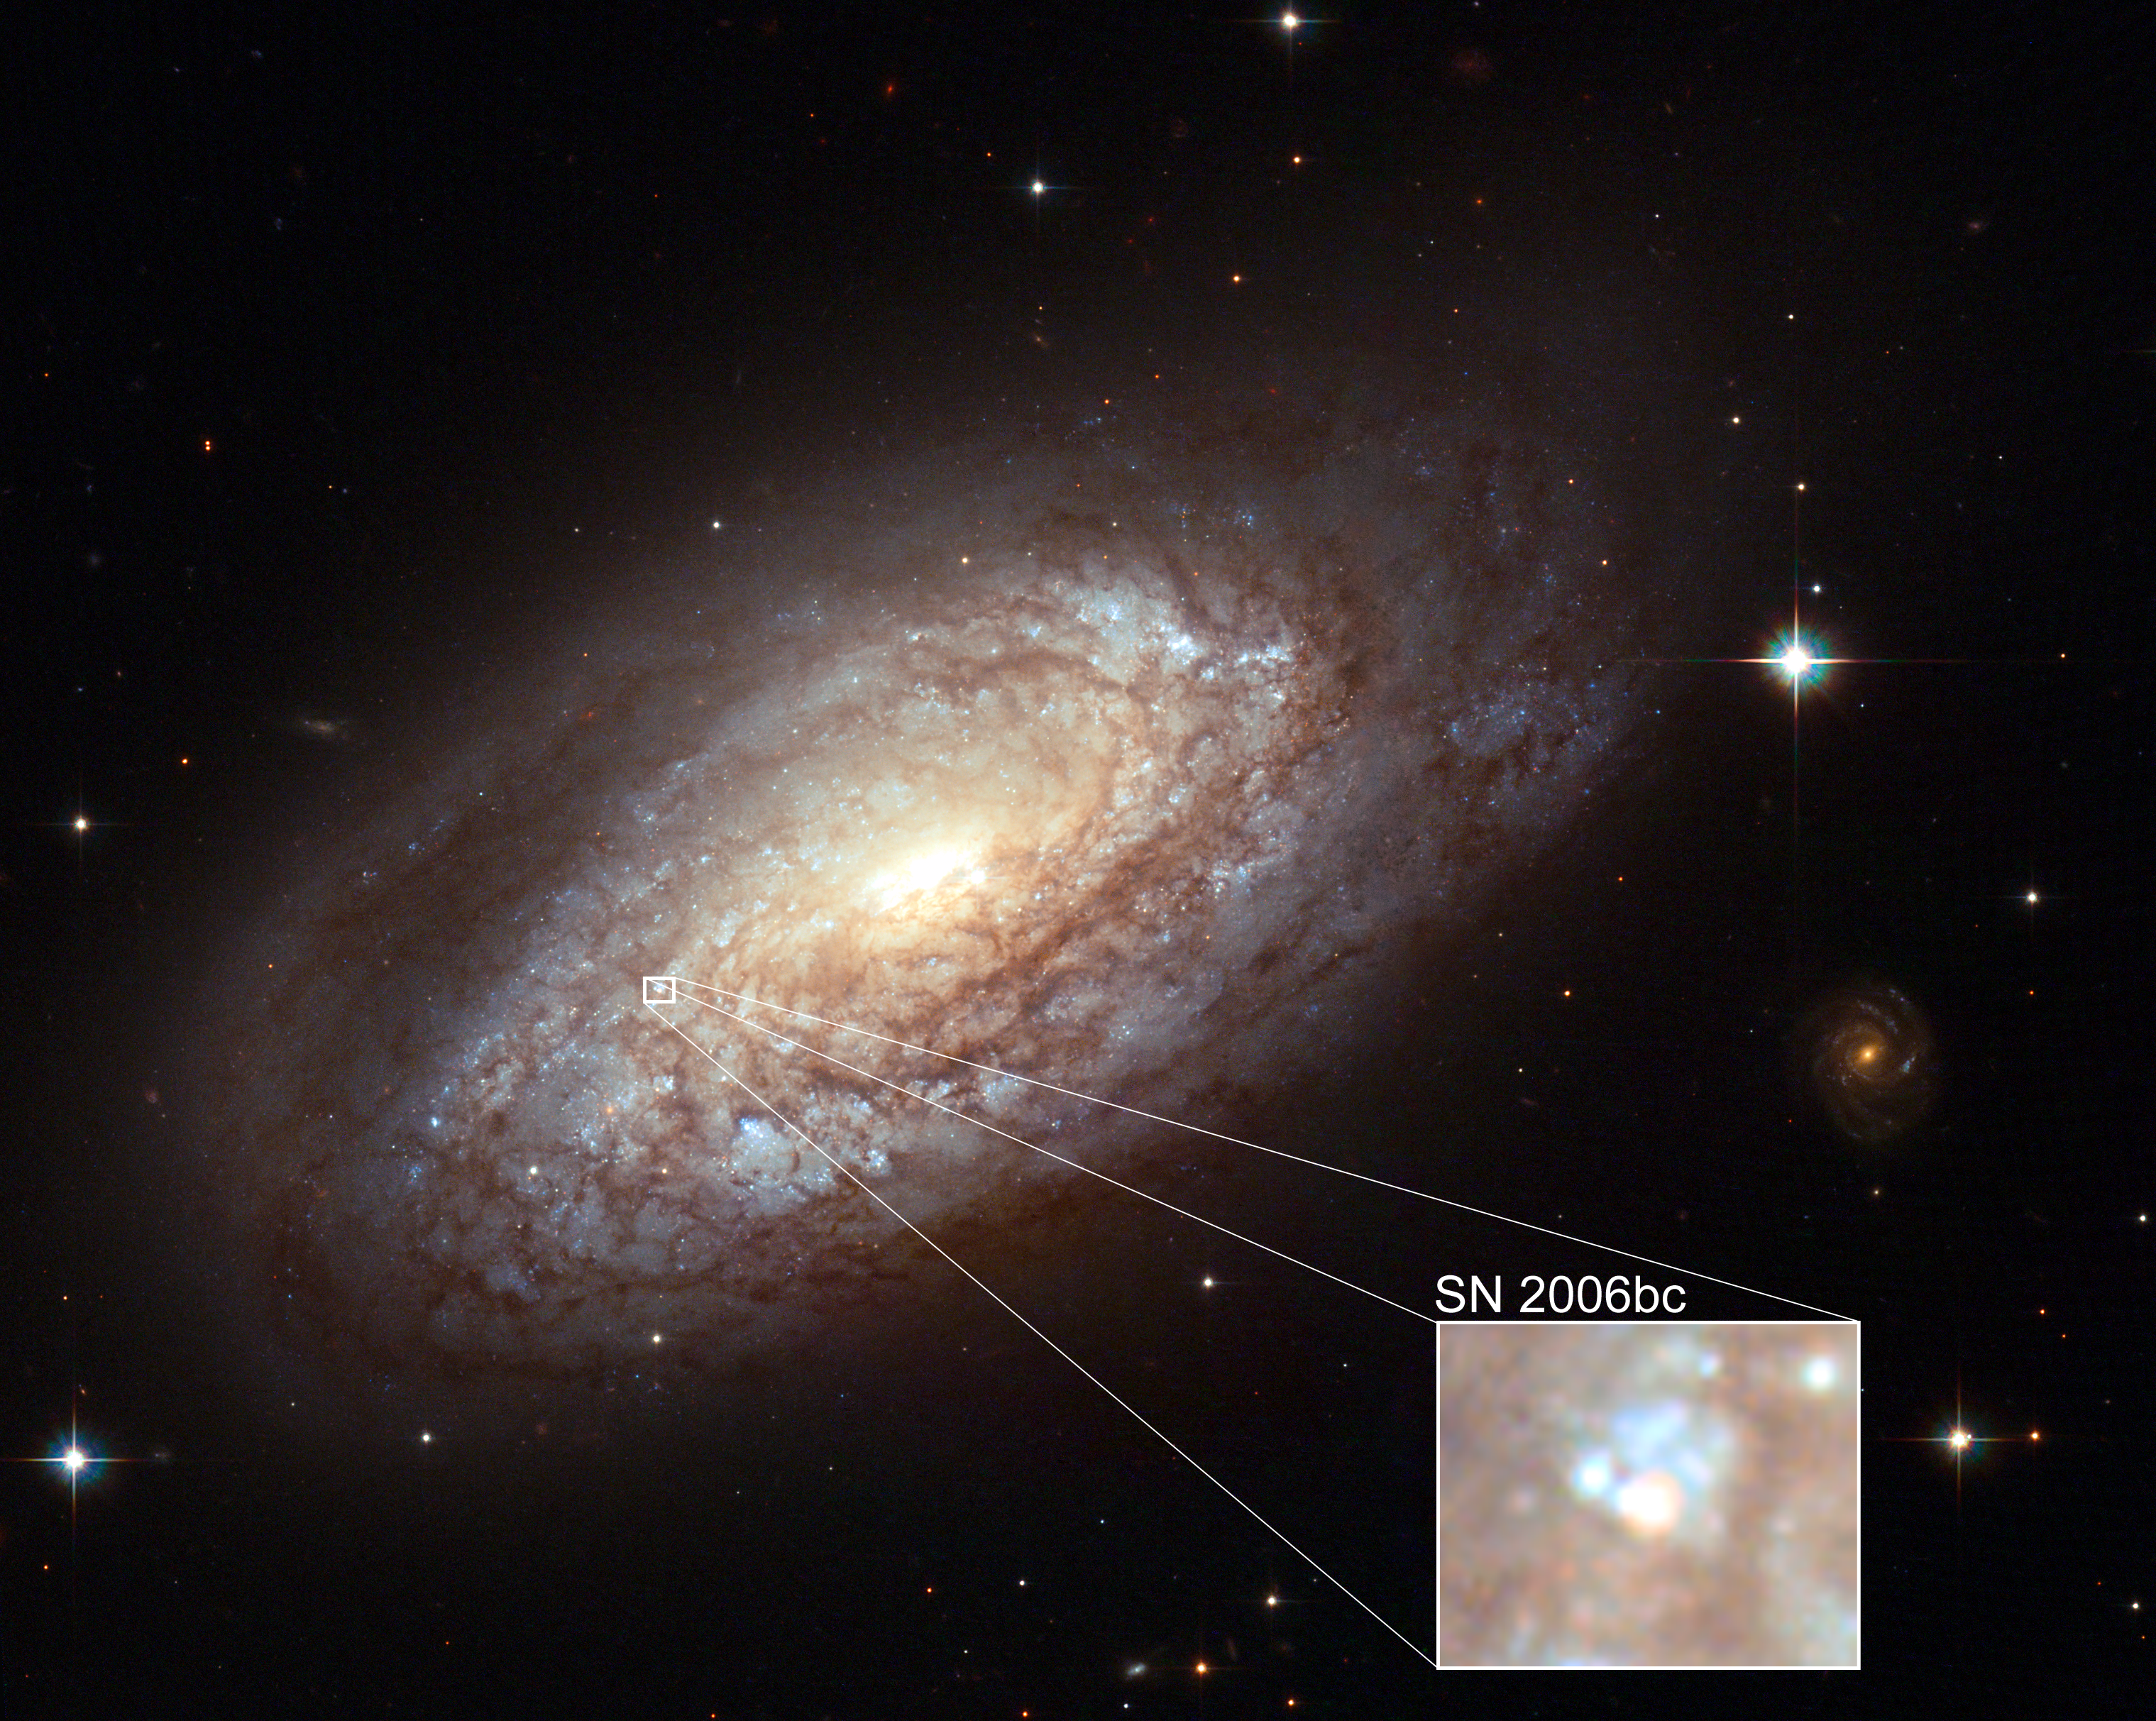

Supernova in NGC 2397

One atypical feature of this Hubble image of the galaxy NGC 2397 is the view of supernova SN 2006bc (marked in the white rectangle) taken when its brightness was on the decrease. Astronomers from Queen's University Belfast in Northern Ireland, led by Professor of Astronomy Stephen J. Smartt, requested the image as part of a long project studying the massive exploding stars - supernovae. Exactly which types of star will explode and the lowest mass of star that can produce a supernova are not known.

Credit: NASA, ESA & Stephen Smartt (Queen's University Belfast, UK)